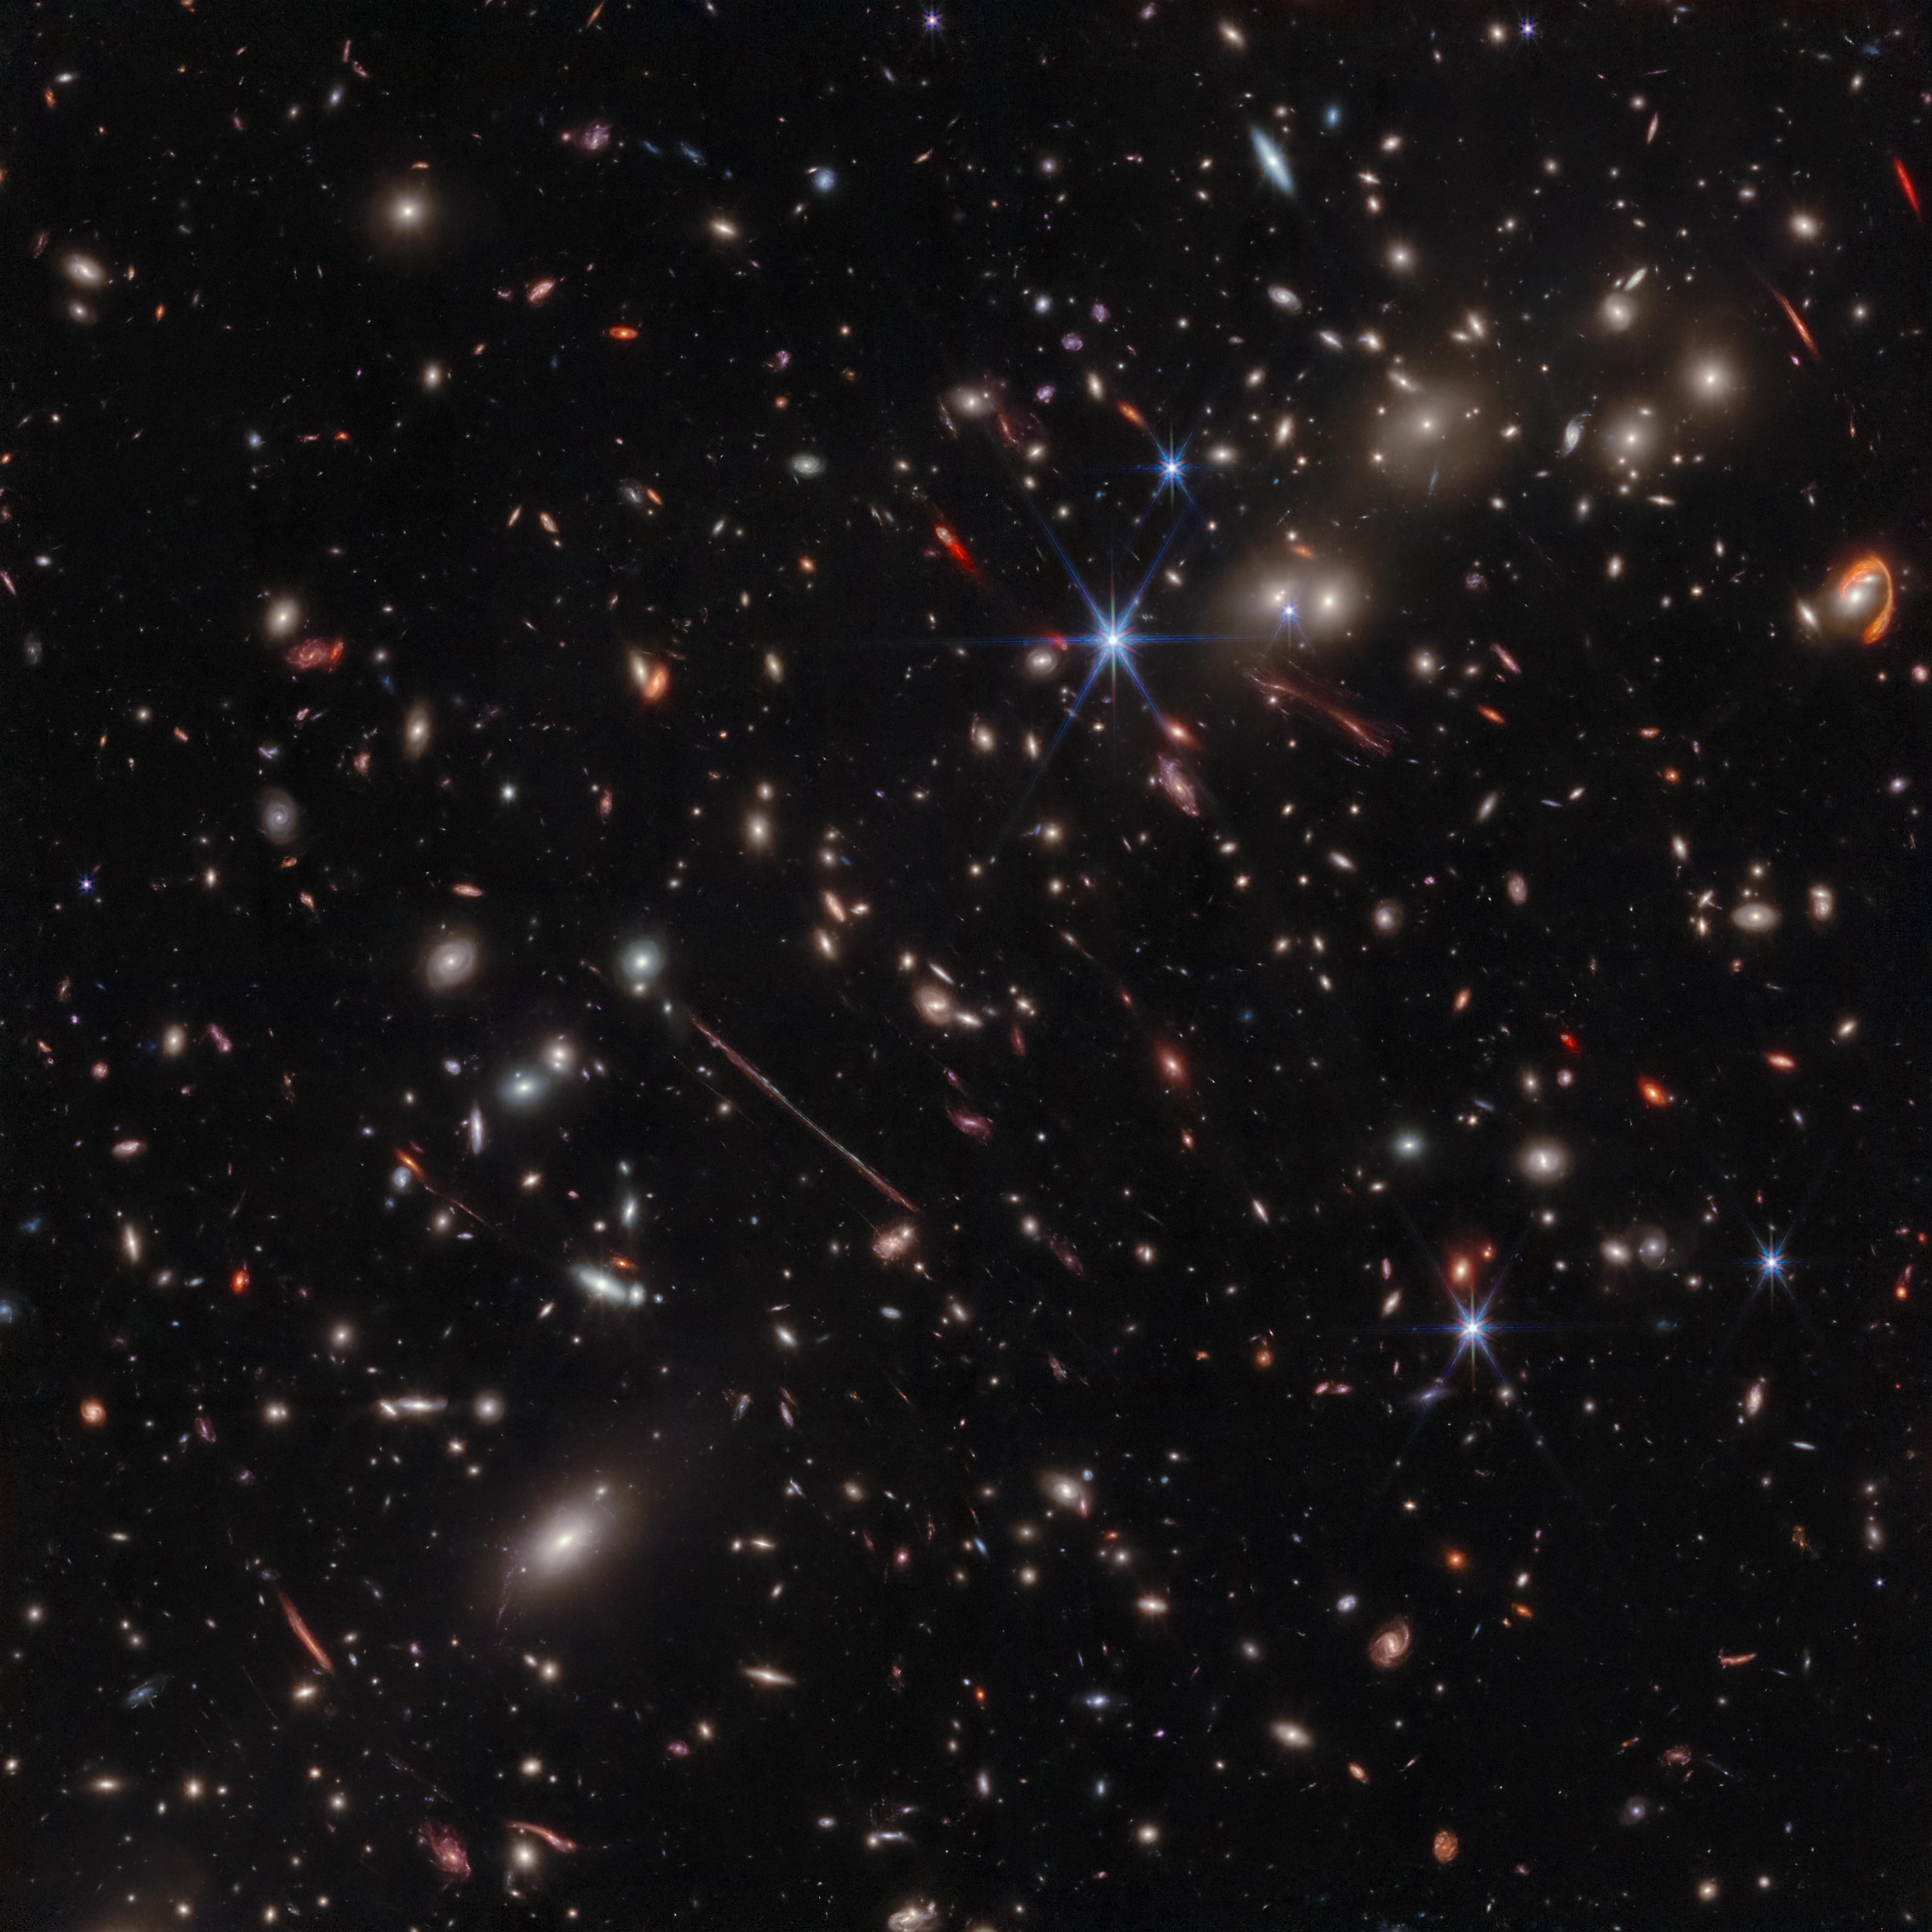

Webb spotlights gravitational arcs in ‘El Gordo’ galaxy cluster (NIRCam image)

A new image of the galaxy cluster known as “El Gordo” is revealing distant and dusty objects never seen before, and providing a bounty of fresh science. The infrared image, taken by the NASA/ESA/CSA James Webb Space Telescope, displays a variety of unusual, distorted background galaxies that were only hinted at in previous NASA/ESA Hubble Space Telescope images.

El Gordo is a cluster of hundreds of galaxies that existed when the universe was 6.2 billion years old, making it a “cosmic teenager.” It’s the most massive cluster known to exist at that time. (“El Gordo” is Spanish for the “Fat One.”)

El Gordo acts as a gravitational lens, distorting and magnifying the light from distant background galaxies. Two of the most prominent features in the image include the Thin One, located just below and left of the image center, and the Fishhook, a red swoosh at upper right. Both are lensed background galaxies.

Credit: NASA, ESA, CSA, J. Diego (Instituto de Física de Cantabria), B. Frye (University of Arizona), P. Kamieneski (Arizona State University), T. Carleton (Arizona State University), R. Windhorst (Arizona State University), A. Pagan (STScI), J. Summers (Arizona State University), J. D’Silva (University of Western Australia), A. Koekemoer (STScI), A. Robotham (University of Western Australia)